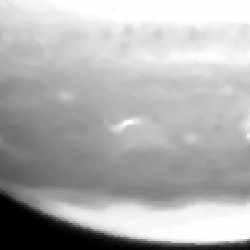

Fragment a impact site

This image shows the fragment A impact site.

Credit: Hubble Space Telescope Comet Team, and NASA/ESA